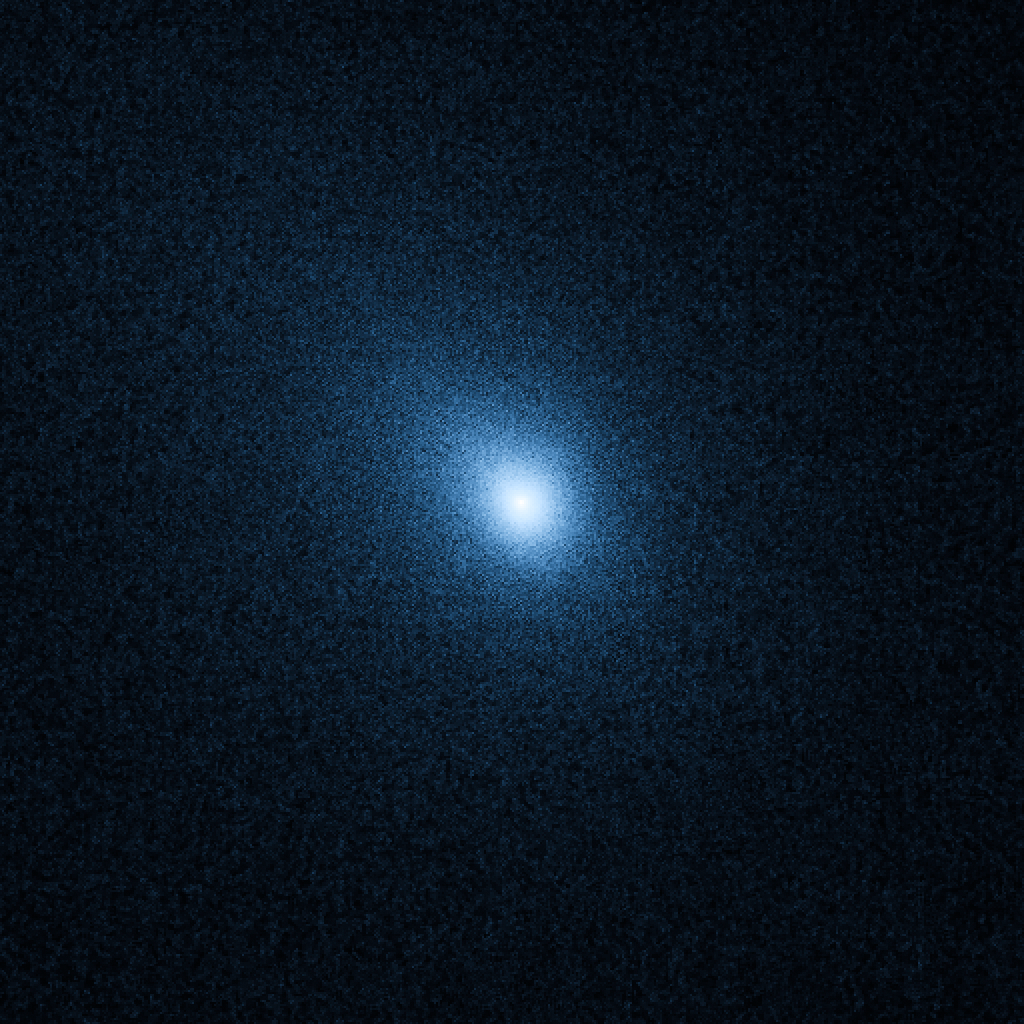

Hubble probes comet 103P/Hartley 2 in preparation for DIXI/EPOXI flyby

Hubble Space Telescope observations of comet 103P/Hartley 2, taken on 25 September, are helping in the planning for a 4 November flyby of the comet by the Deep Impact eXtended Investigation (DIXI) on NASA's EPOXI spacecraft.

Analysis of the new Hubble data shows that the nucleus has a diameter of approximately 1.5 kilometres, which is consistent with previous estimates.

The comet is in a highly active state as it approaches the Sun. The Hubble data show that the coma is remarkably uniform, with no evidence for the types of outgassing jets seen from most "Jupiter Family" comets, of which Hartley 2 is a member.

Jets can be produced when the dust emanates from a few specific icy regions, while most of the surface is covered with relatively inert, meteoritic-like material. In stark contrast, the activity from Hartley 2's nucleus appears to be more uniformly distributed over its entire surface, perhaps indicating a relatively "young" surface that hasn't yet been crusted over.

Hubble's spectrographs — the Cosmic Origins Spectrograph (COS) and the Space Telescope Imaging Spectrograph (STIS) — are expected to provide unique information about the comet's chemical composition that might not be obtainable any other way, including measurements by DIXI. The Hubble team is specifically searching for emissions from carbon monoxide (CO) and diatomic sulfur (S2). These molecules have been seen in other comets but have not yet been detected in 103P/Hartley 2.

103P/Hartley has an orbital period of 6.46 years. It was discovered by Malcolm Hartley in 1986 at the Schmidt Telescope Unit in Siding Spring, Australia. The comet will pass within 18 million kilometres of Earth (about 45 times the distance to the Moon) on 20 October. During that time the comet may be visible to the naked eye as a 5th magnitude "fuzzy star" in the constellation Auriga.

Credit: NASA, ESA, and H. Weaver (The Johns Hopkins University/Applied Physics Lab, USA)